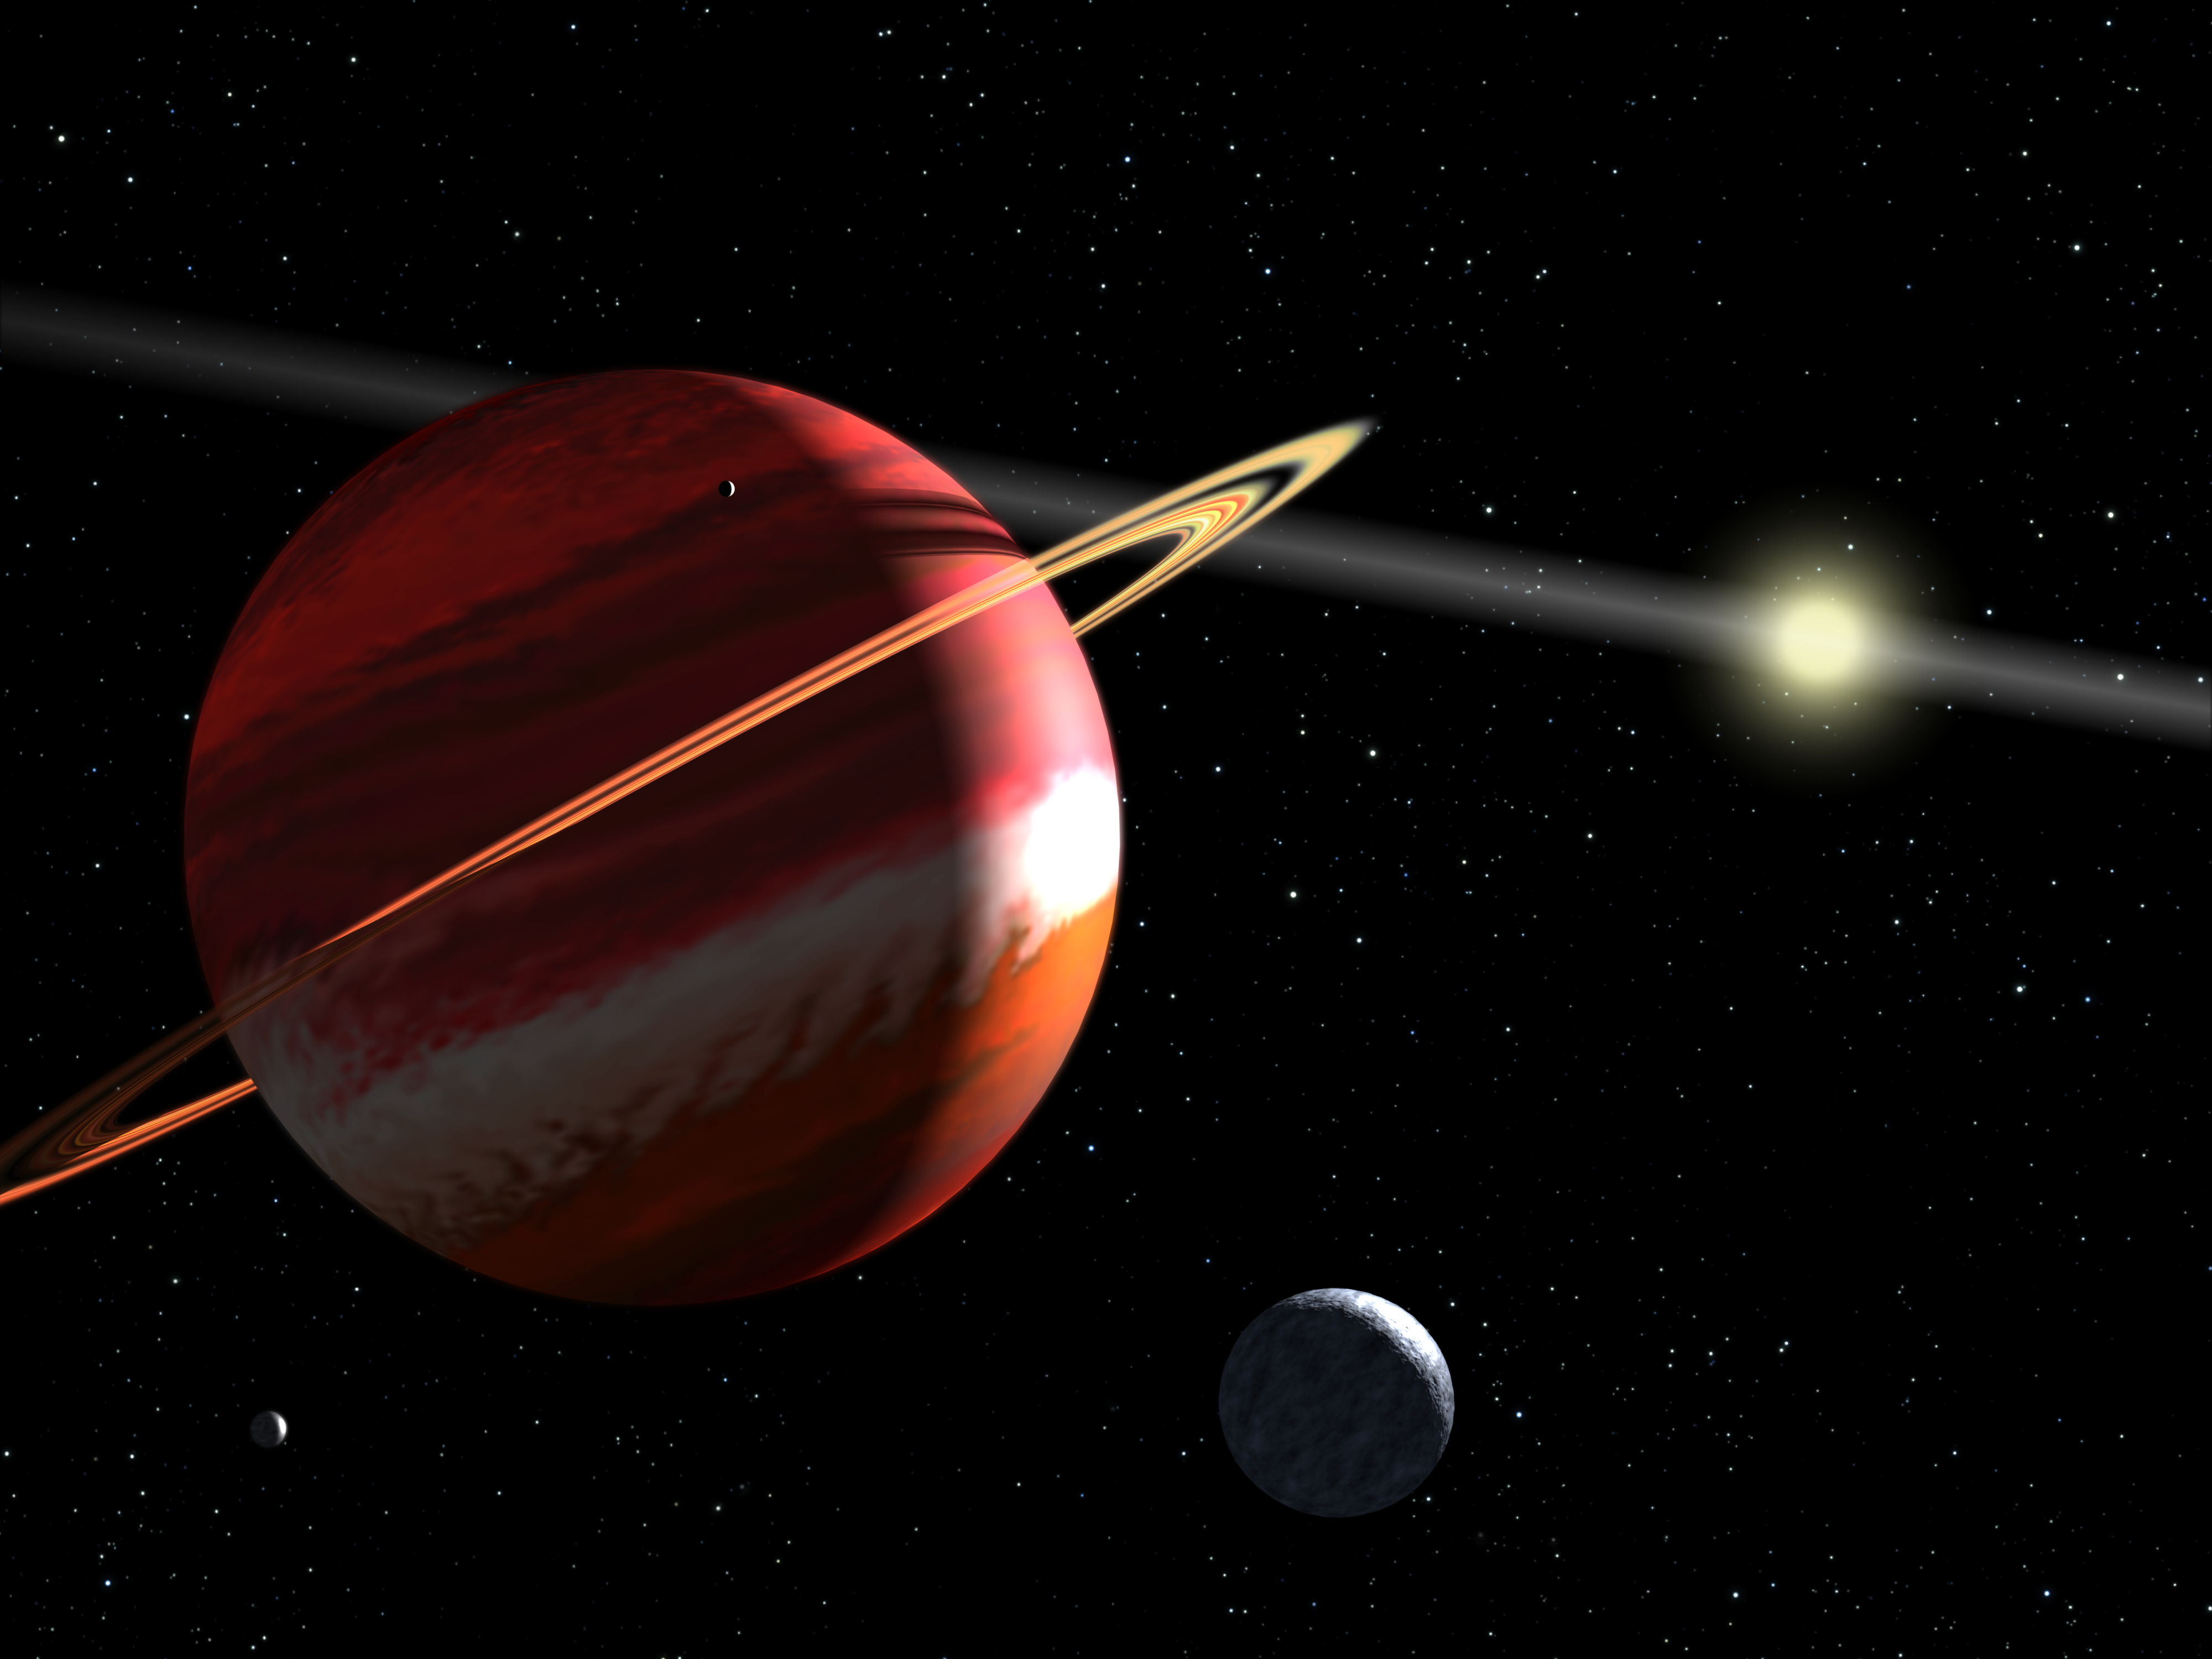

Artist's concept of nearest extrasolar planet to our Solar System

This is an artist's concept of a Jupiter-mass planet orbiting the nearby star Epsilon Eridani. Located 10.5 light-years away, it is the closest known extrasolar planet to our solar system. The planet is in an elliptical orbit that carries it as close to the star as Earth is from the Sun, and as far from the star as Jupiter is from the Sun.

Epsilon Eridani is a young star, only 800 million years old. It is still surrounded by a disk of dust that extends 30 billion kilometres from the star. The disk appears as a linear sheet of reflecting dust in this view because it is seen edge-on from the planet's orbit, which is in the same plane as the dust disk.

The planet's rings and satellites are purely hypothetical in this view, but plausible. As a gas giant, the planet is uninhabitable for life as we know it. However, any moons might have conditions suitable for life.

Astronomers determined the planet's mass and orbital tilt in 2006 by using Hubble to measure the unseen planet's gravitational pull on the star as it slowly moved across the sky. Evidence for the planet first appeared in 2000 when astronomers measured a telltale wobble in the star.

Credit: NASA, ESA, and G. Bacon (STScI)